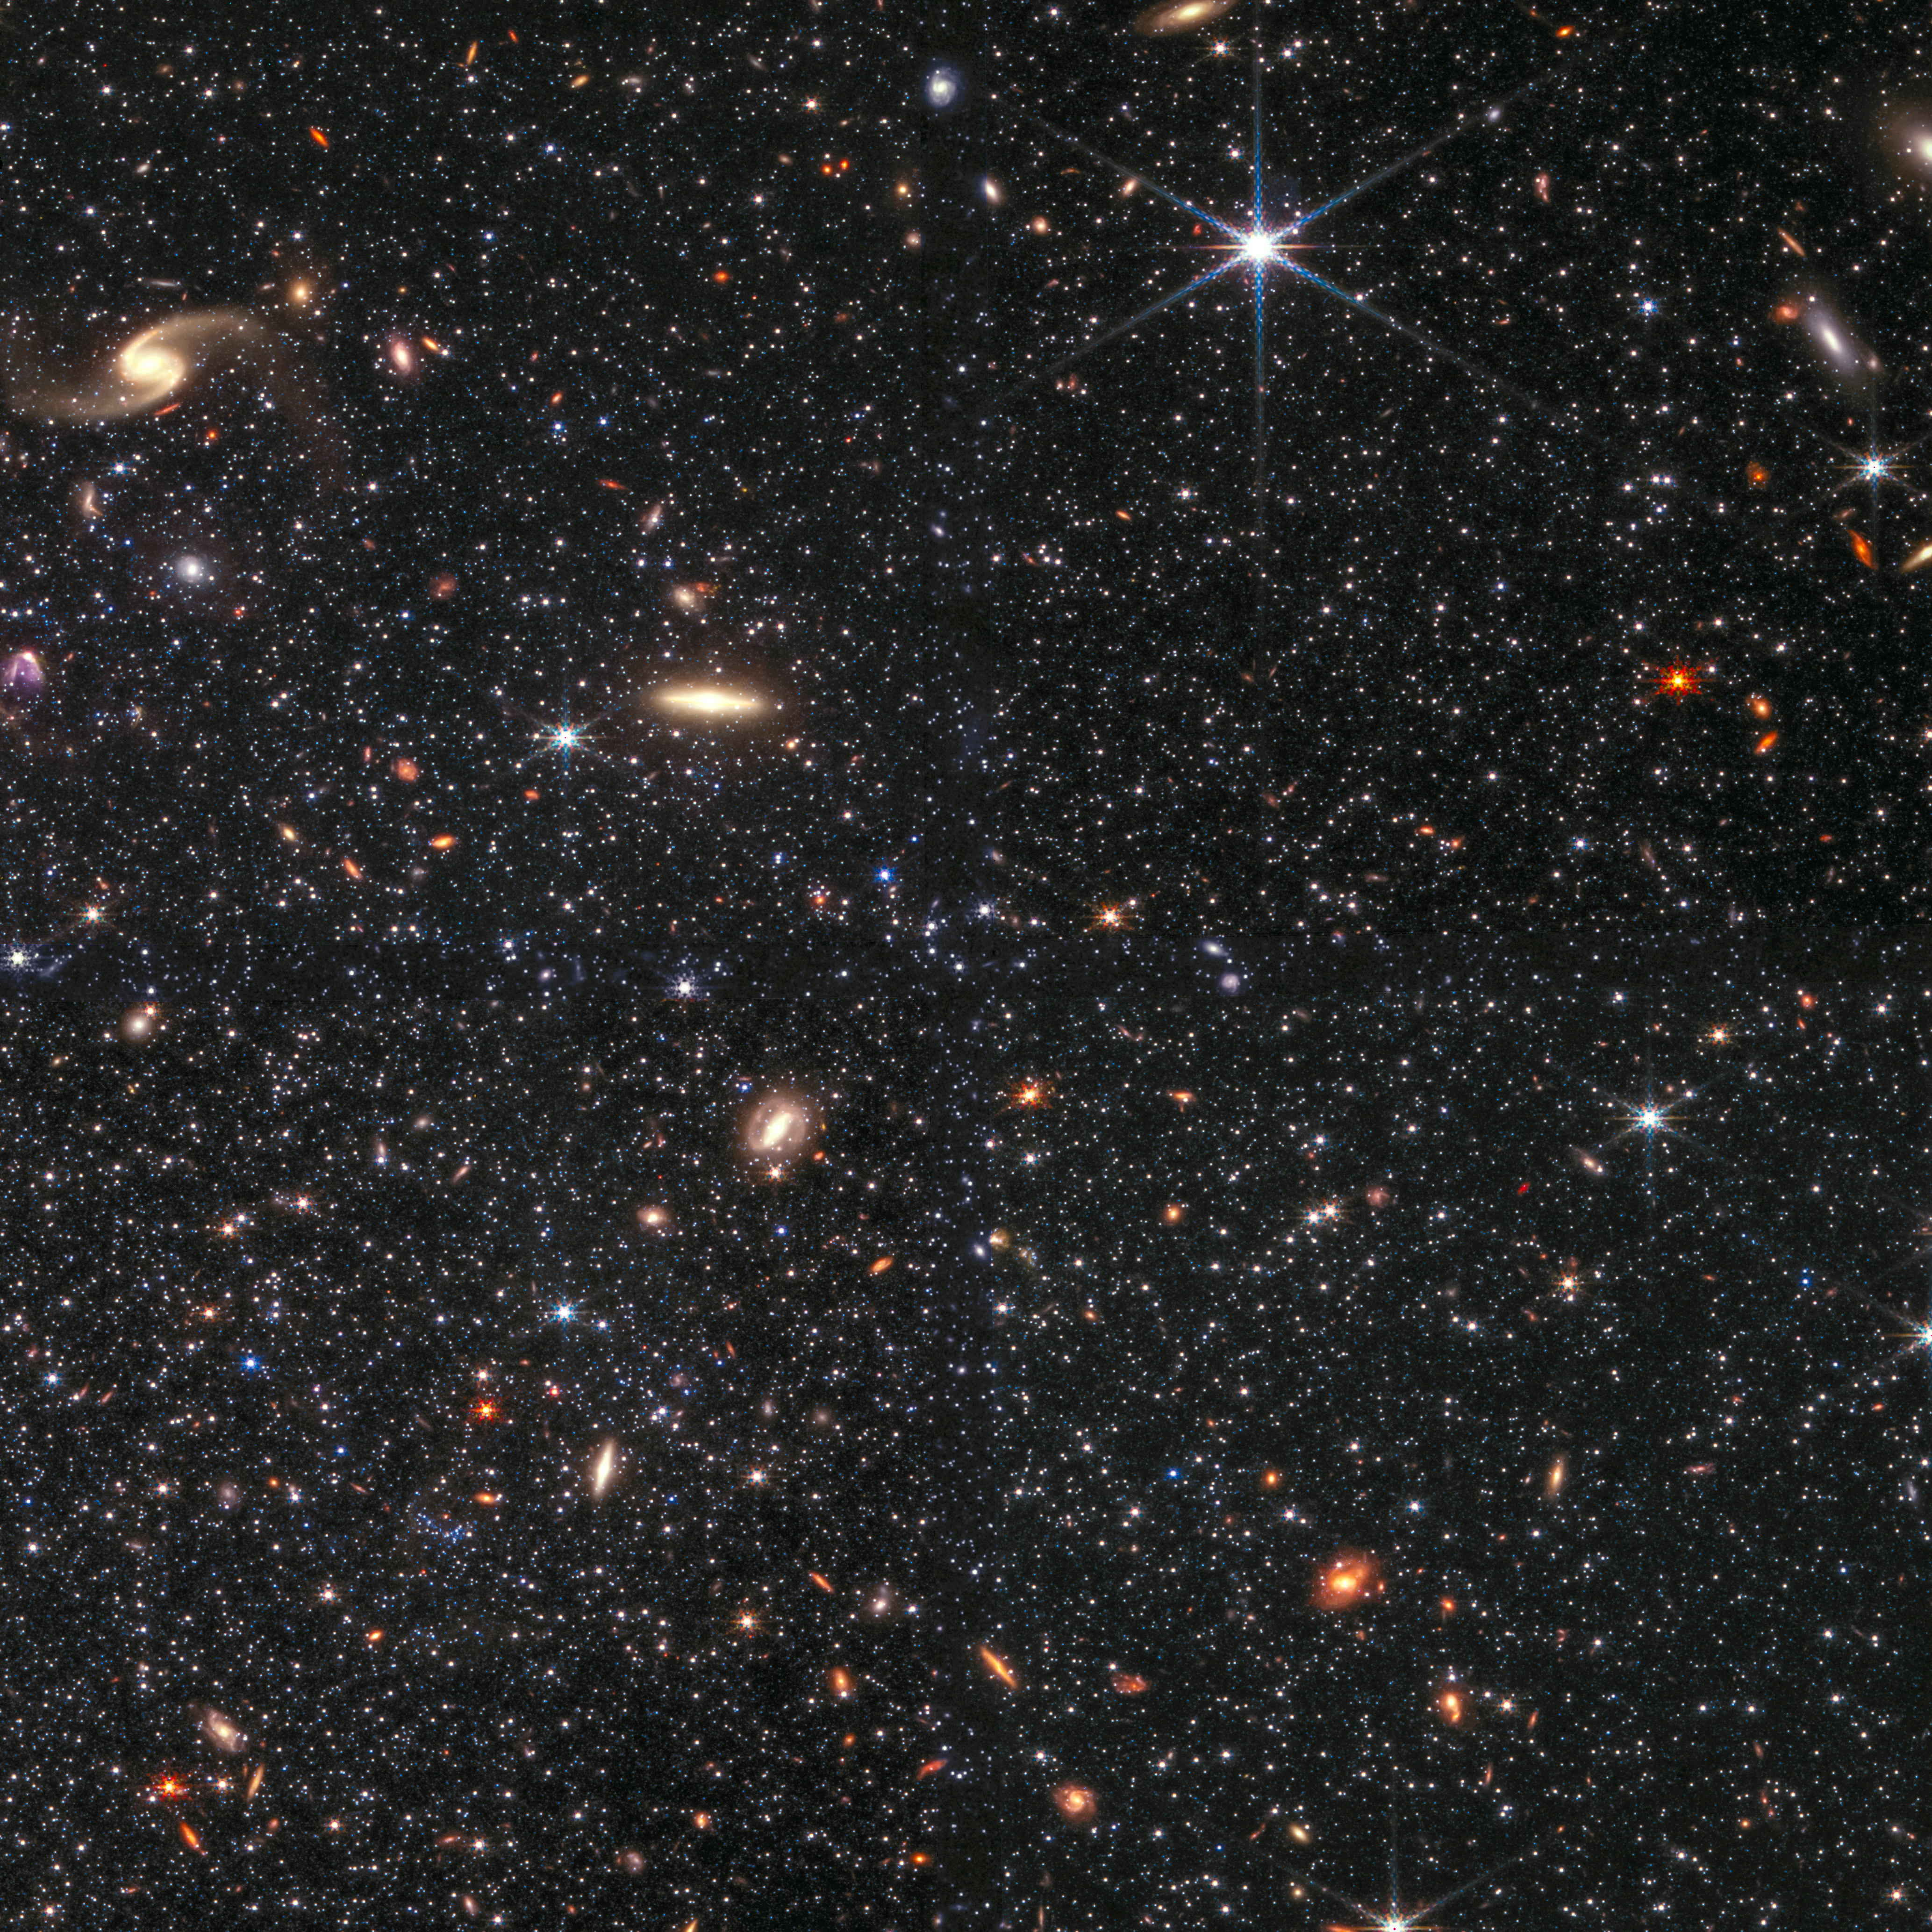

Dwarf Galaxy WLM

This image shows a portion of the dwarf galaxy Wolf–Lundmark–Melotte (WLM) captured by the NASA/ESA/CSA James Webb Space Telescope’s Near-Infrared Camera. The image demonstrates Webb’s remarkable ability to resolve faint stars outside the Milky Way.

This observation was taken as part of Webb’s Early Release Science (ERS) program 1334, focused on resolved stellar populations. The dwarf galaxy WLM was selected for this program as its gas is similar to that which made up galaxies in the early Universe and it is relatively nearby, meaning that Webb can differentiate between its individual stars. Learn more about Webb’s research of the dwarf galaxy WLM here.

The galaxy lies roughly 3 million light-years away.

This image includes 0.9-micron light shown in blue, 1.5-micron in cyan, 2.5-micron in yellow, and 4.3-micron in red (filters F090W, F150W, F250M, and F430M).

Note: This image highlights Webb’s science in progress, which has not yet been through the peer-review process.

Credit: NASA, ESA, CSA, STScI, and K. McQuinn (Rutgers University), A. Pagan (STScI).